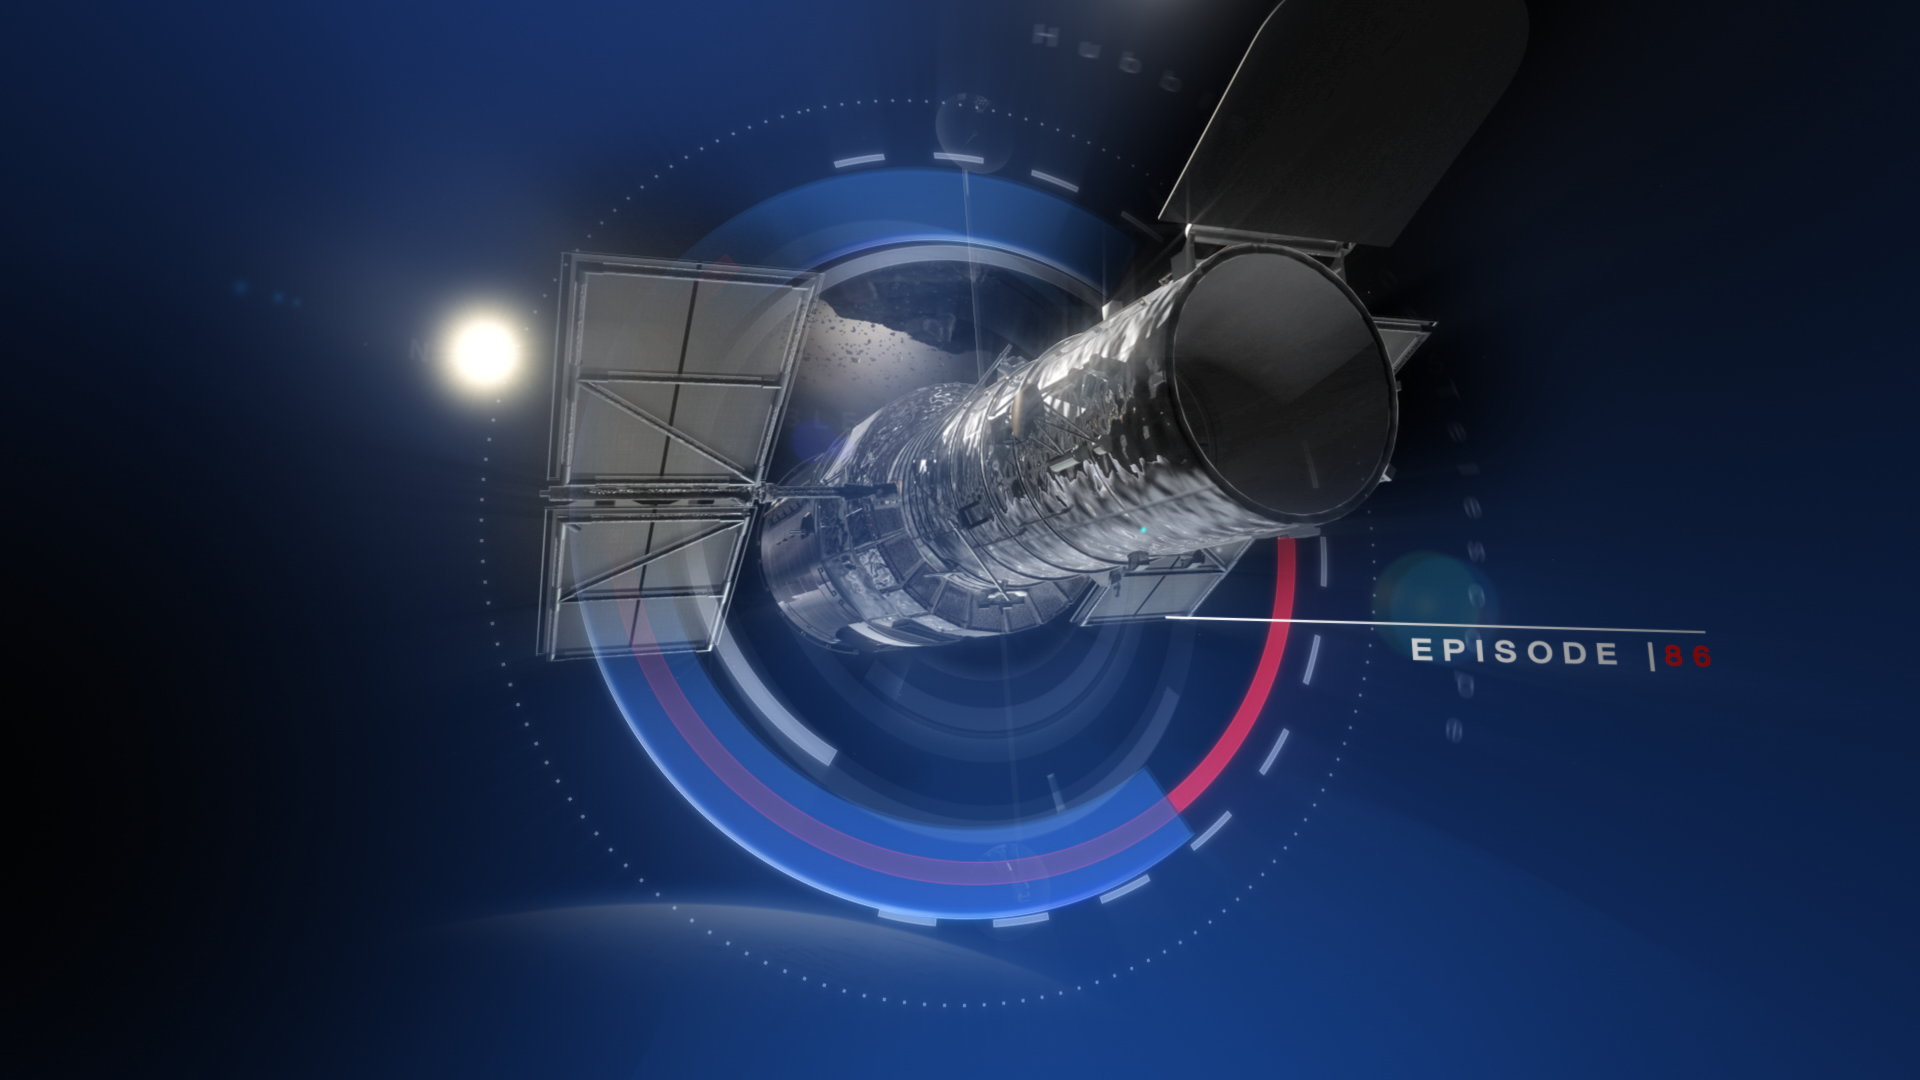

Still from: Hubblecast episode 86: the wings of the Twin Jet Nebula

This is a still from Hubblecast 85, which focuses on planetary nebulae and, in particular, the spectacular Twin Jet Nebula.

Credit: NASA & ESA